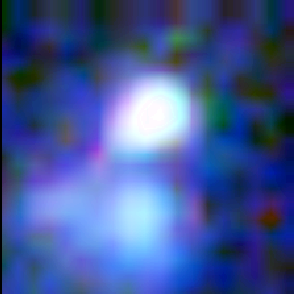

Galaxy building blocks

This is one Proto Galaxy out of a series of 18, taken by the Wide Field Planetary Camera 2.

Credit: Rogier Windhorst and Sam Pascarelle (Arizona State University) and NASA/ESA